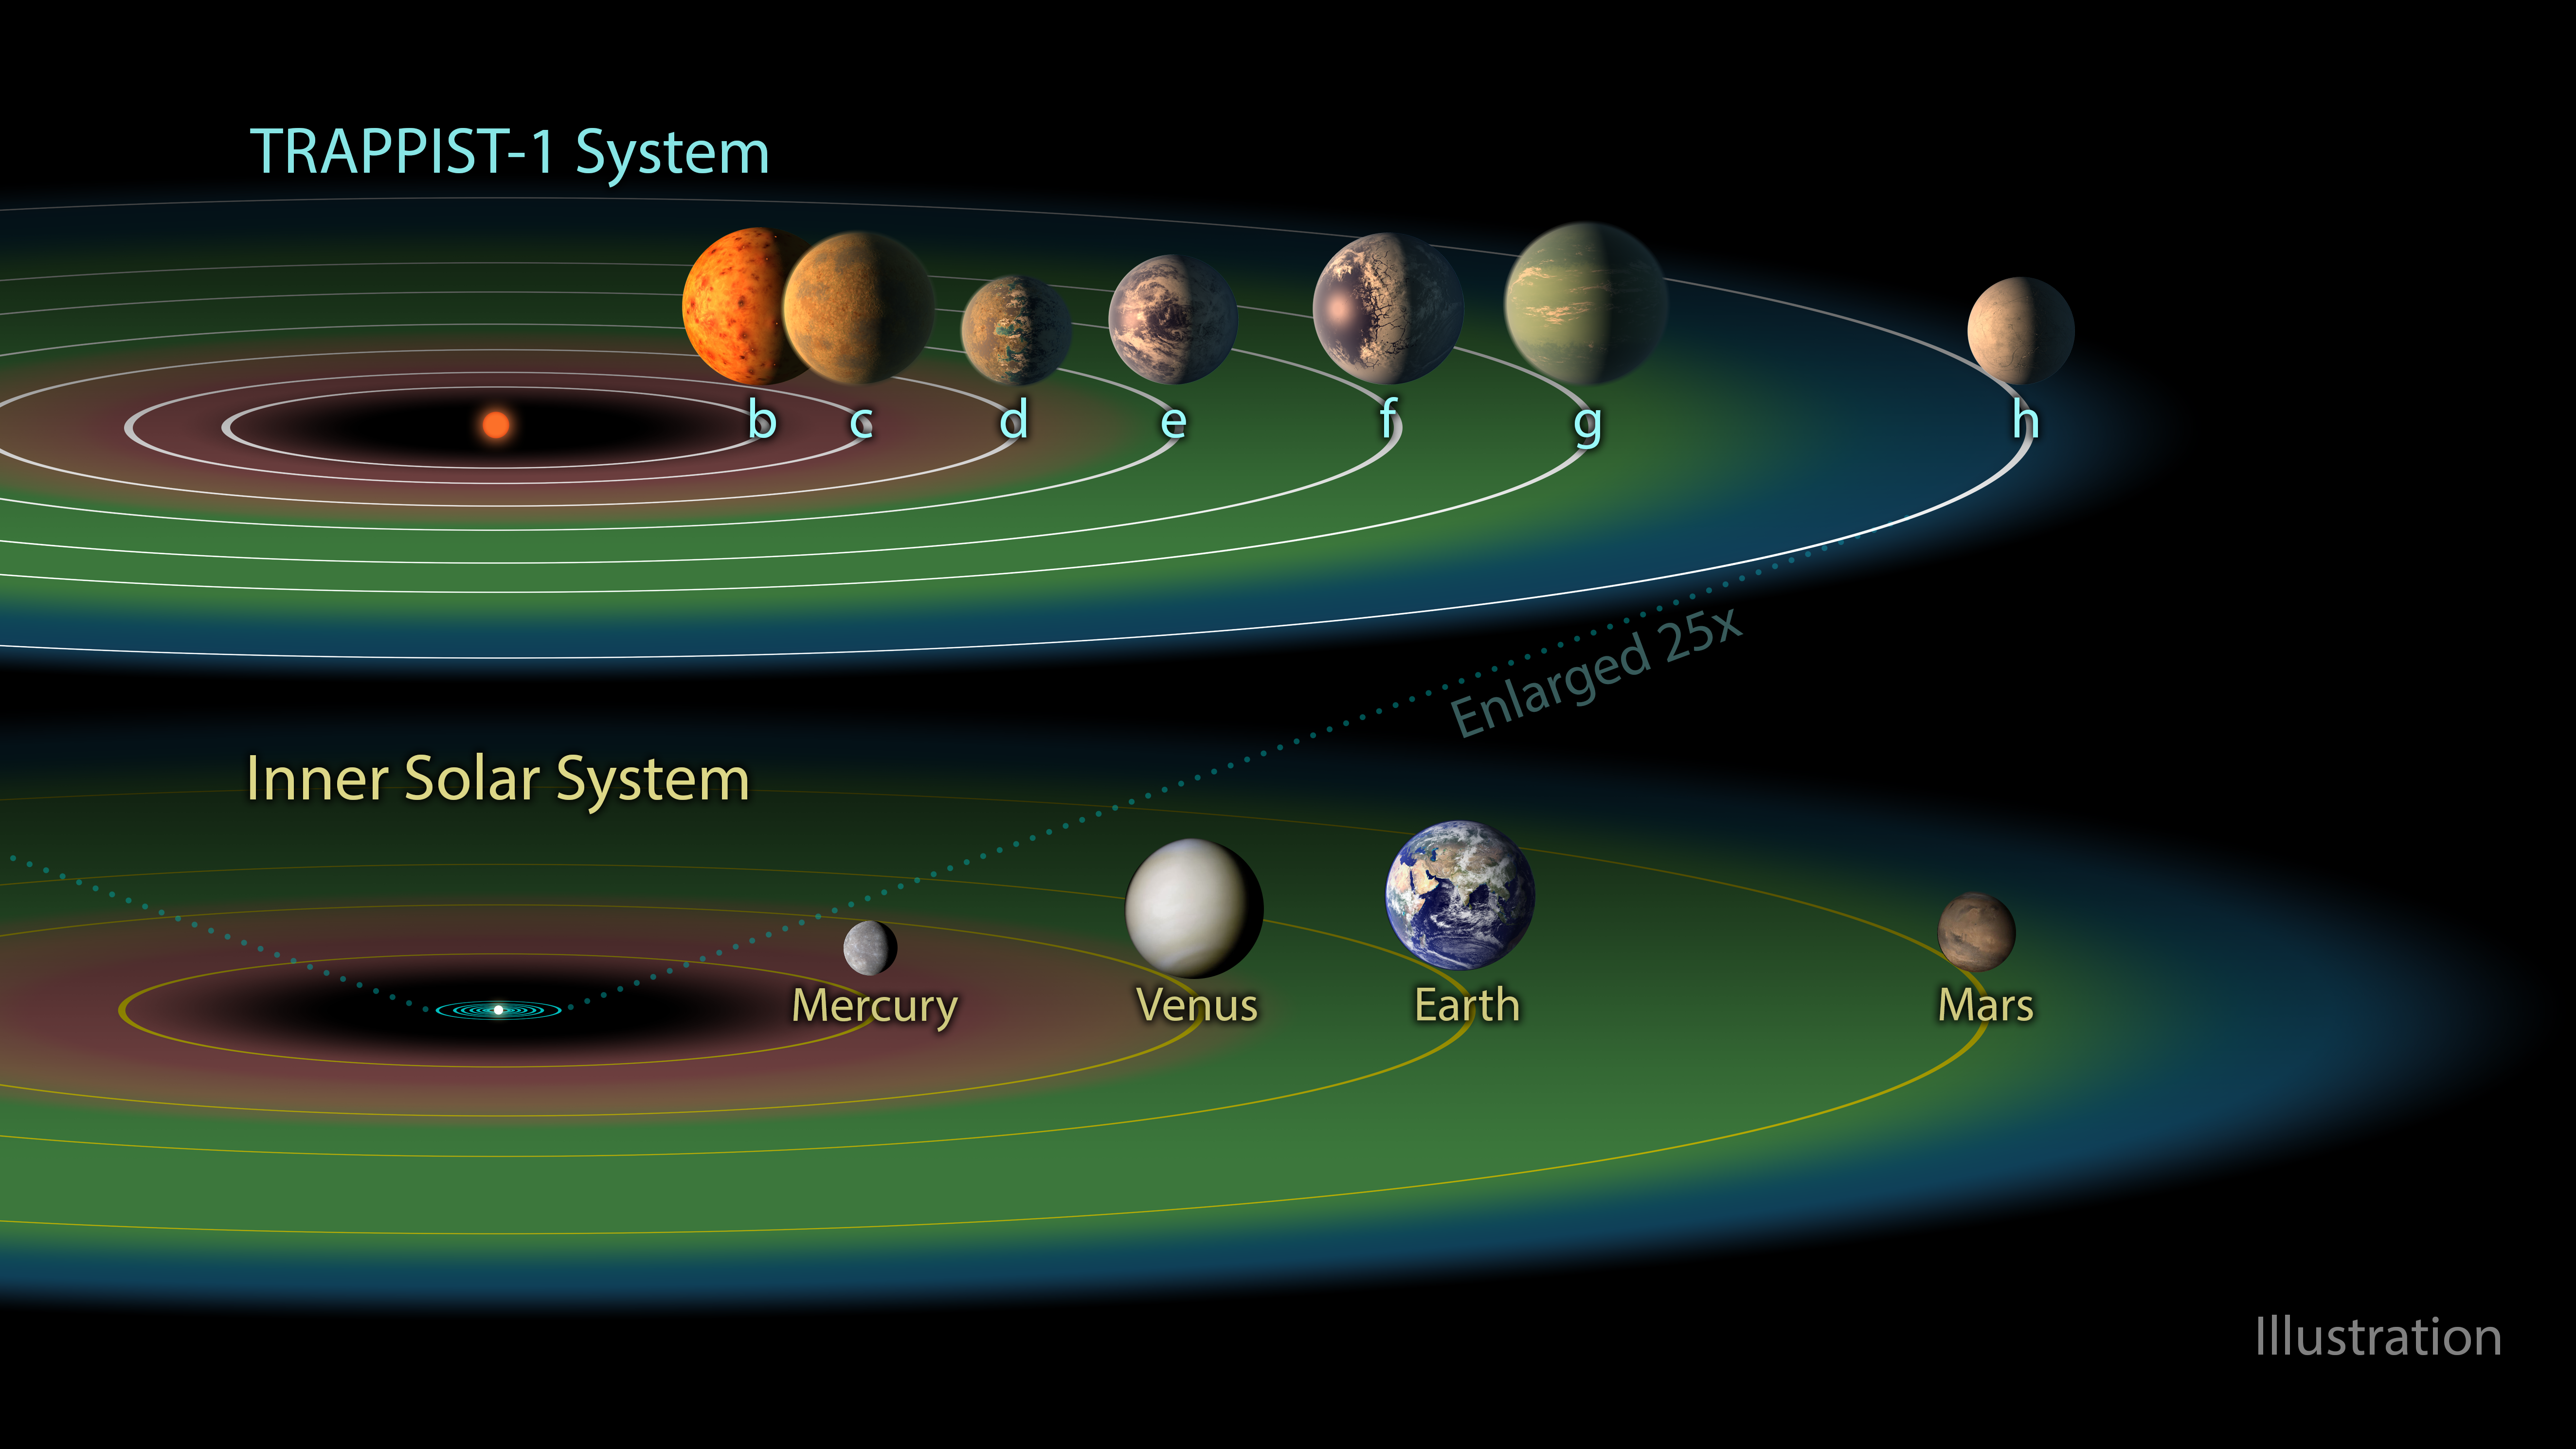

The habitable zone in the TRAPPIST-1 system

The TRAPPIST-1 system contains a total of seven known Earth-sized planets. Three of them — TRAPPIST-1e, f and g — are located in the habitable zone of the star (shown in green in this artist’s impression), where temperatures are just right for liquid water to exist on the surface.

While TRAPPIST-1b, c and d are too close to their parent star and TRAPPIST-1h is too far away, the remaining three planets could have the right conditions to harbour life.

As a comparison to the TRAPPIST-1 system the inner part of the Solar System and its habitable zone is shown.

Credit: NASA/JPL-Caltech